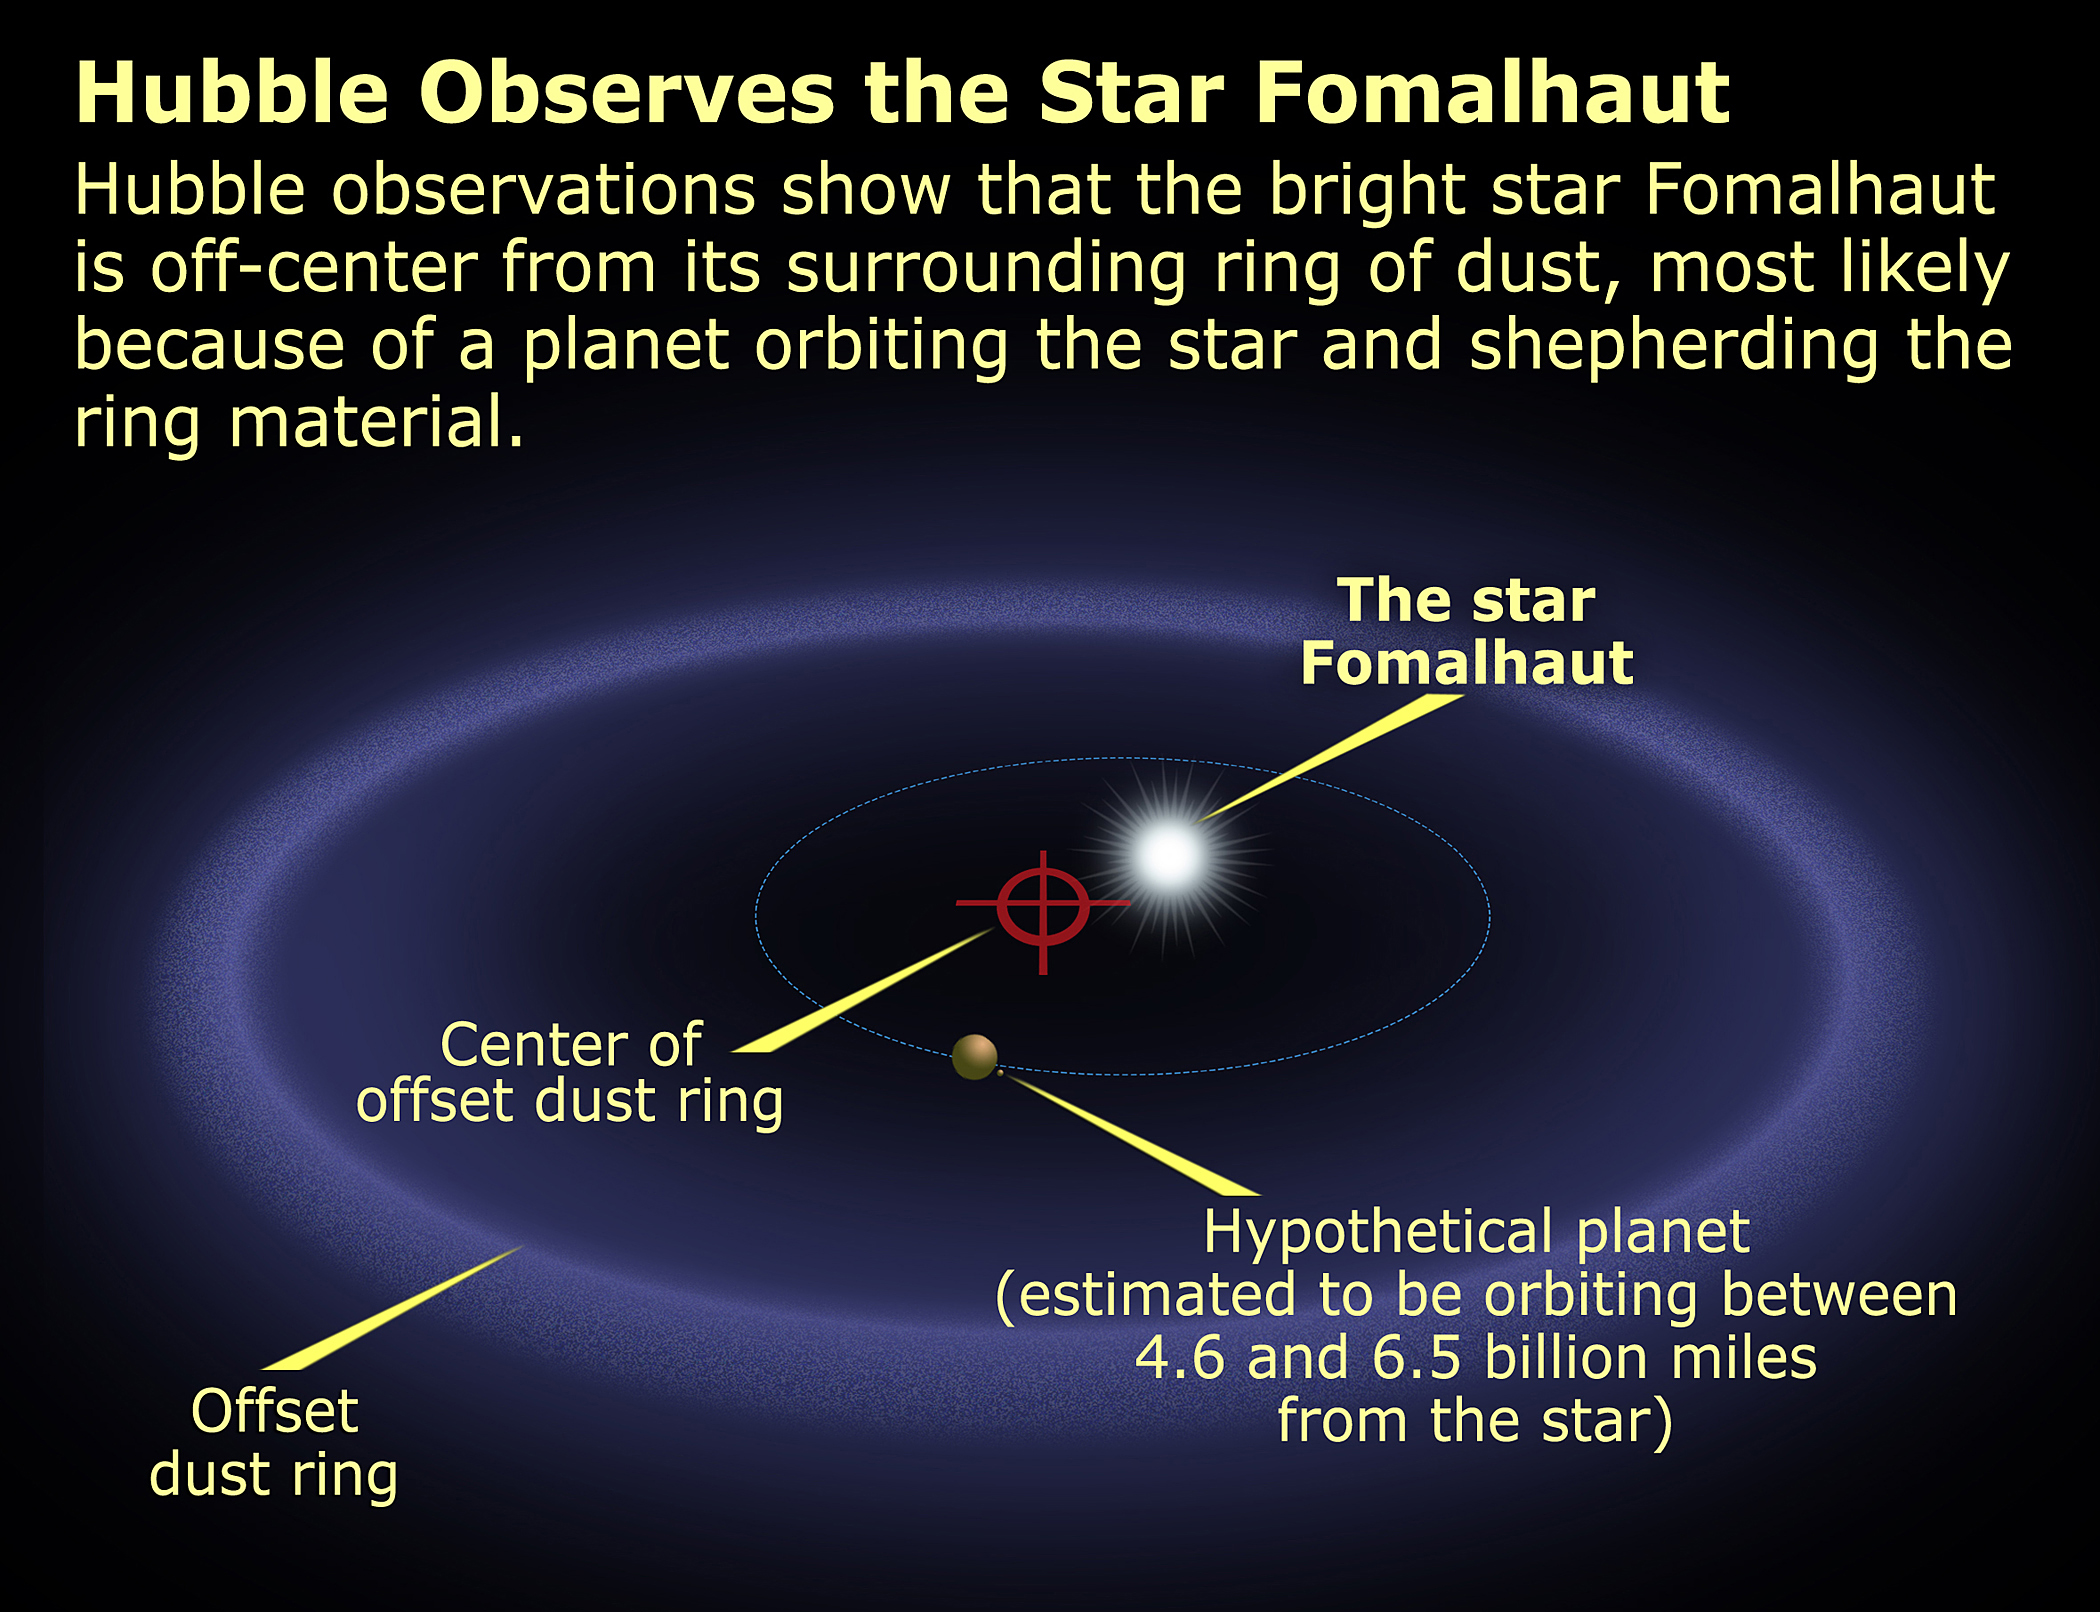

Fomalhaut Ring Schematic

Hubble observations show that the bright star Fomalhaut is off-center from its surrounding ring of dust, most likely because of a planet orbiting the star and shepherding the ring material.

Credit: NASA, ESA and A. Feild (STScI)